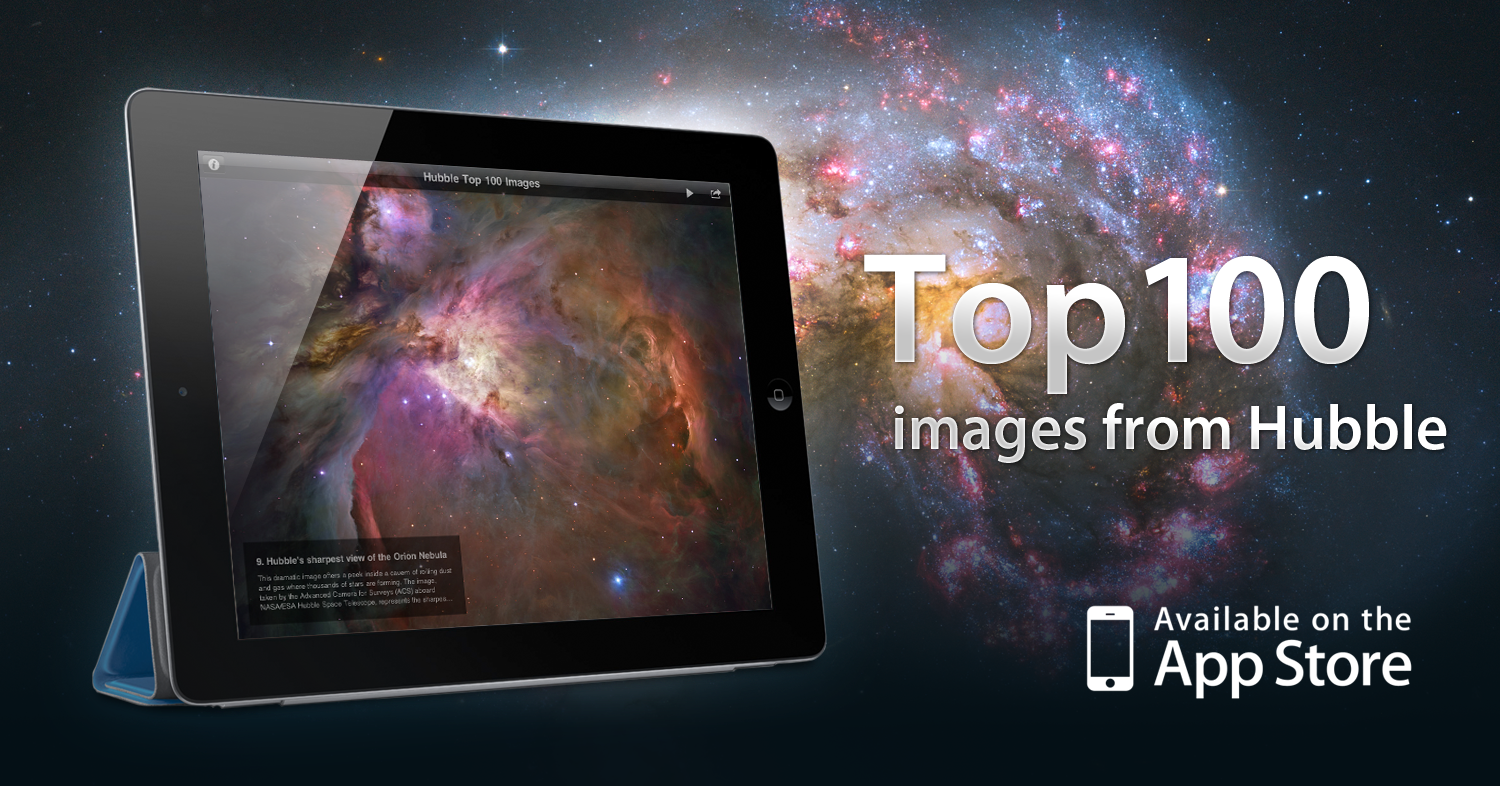

The ESA/Hubble Top 100 images iPad app

The ESA/Hubble Top 100 Images app is a free iPad app that brings users a selection of the most dramatic photos of the Universe from ESA/Hubble, as NASA’s partner in this international project. Among the features of the app are captions and links for more information, a wallpaper option, slideshow play mode with background music. The image shows screenshots from the ESA/Hubble Top 100 Images app. You can download the app for free from here.

Credit: ESA/Victor R. Ruiz